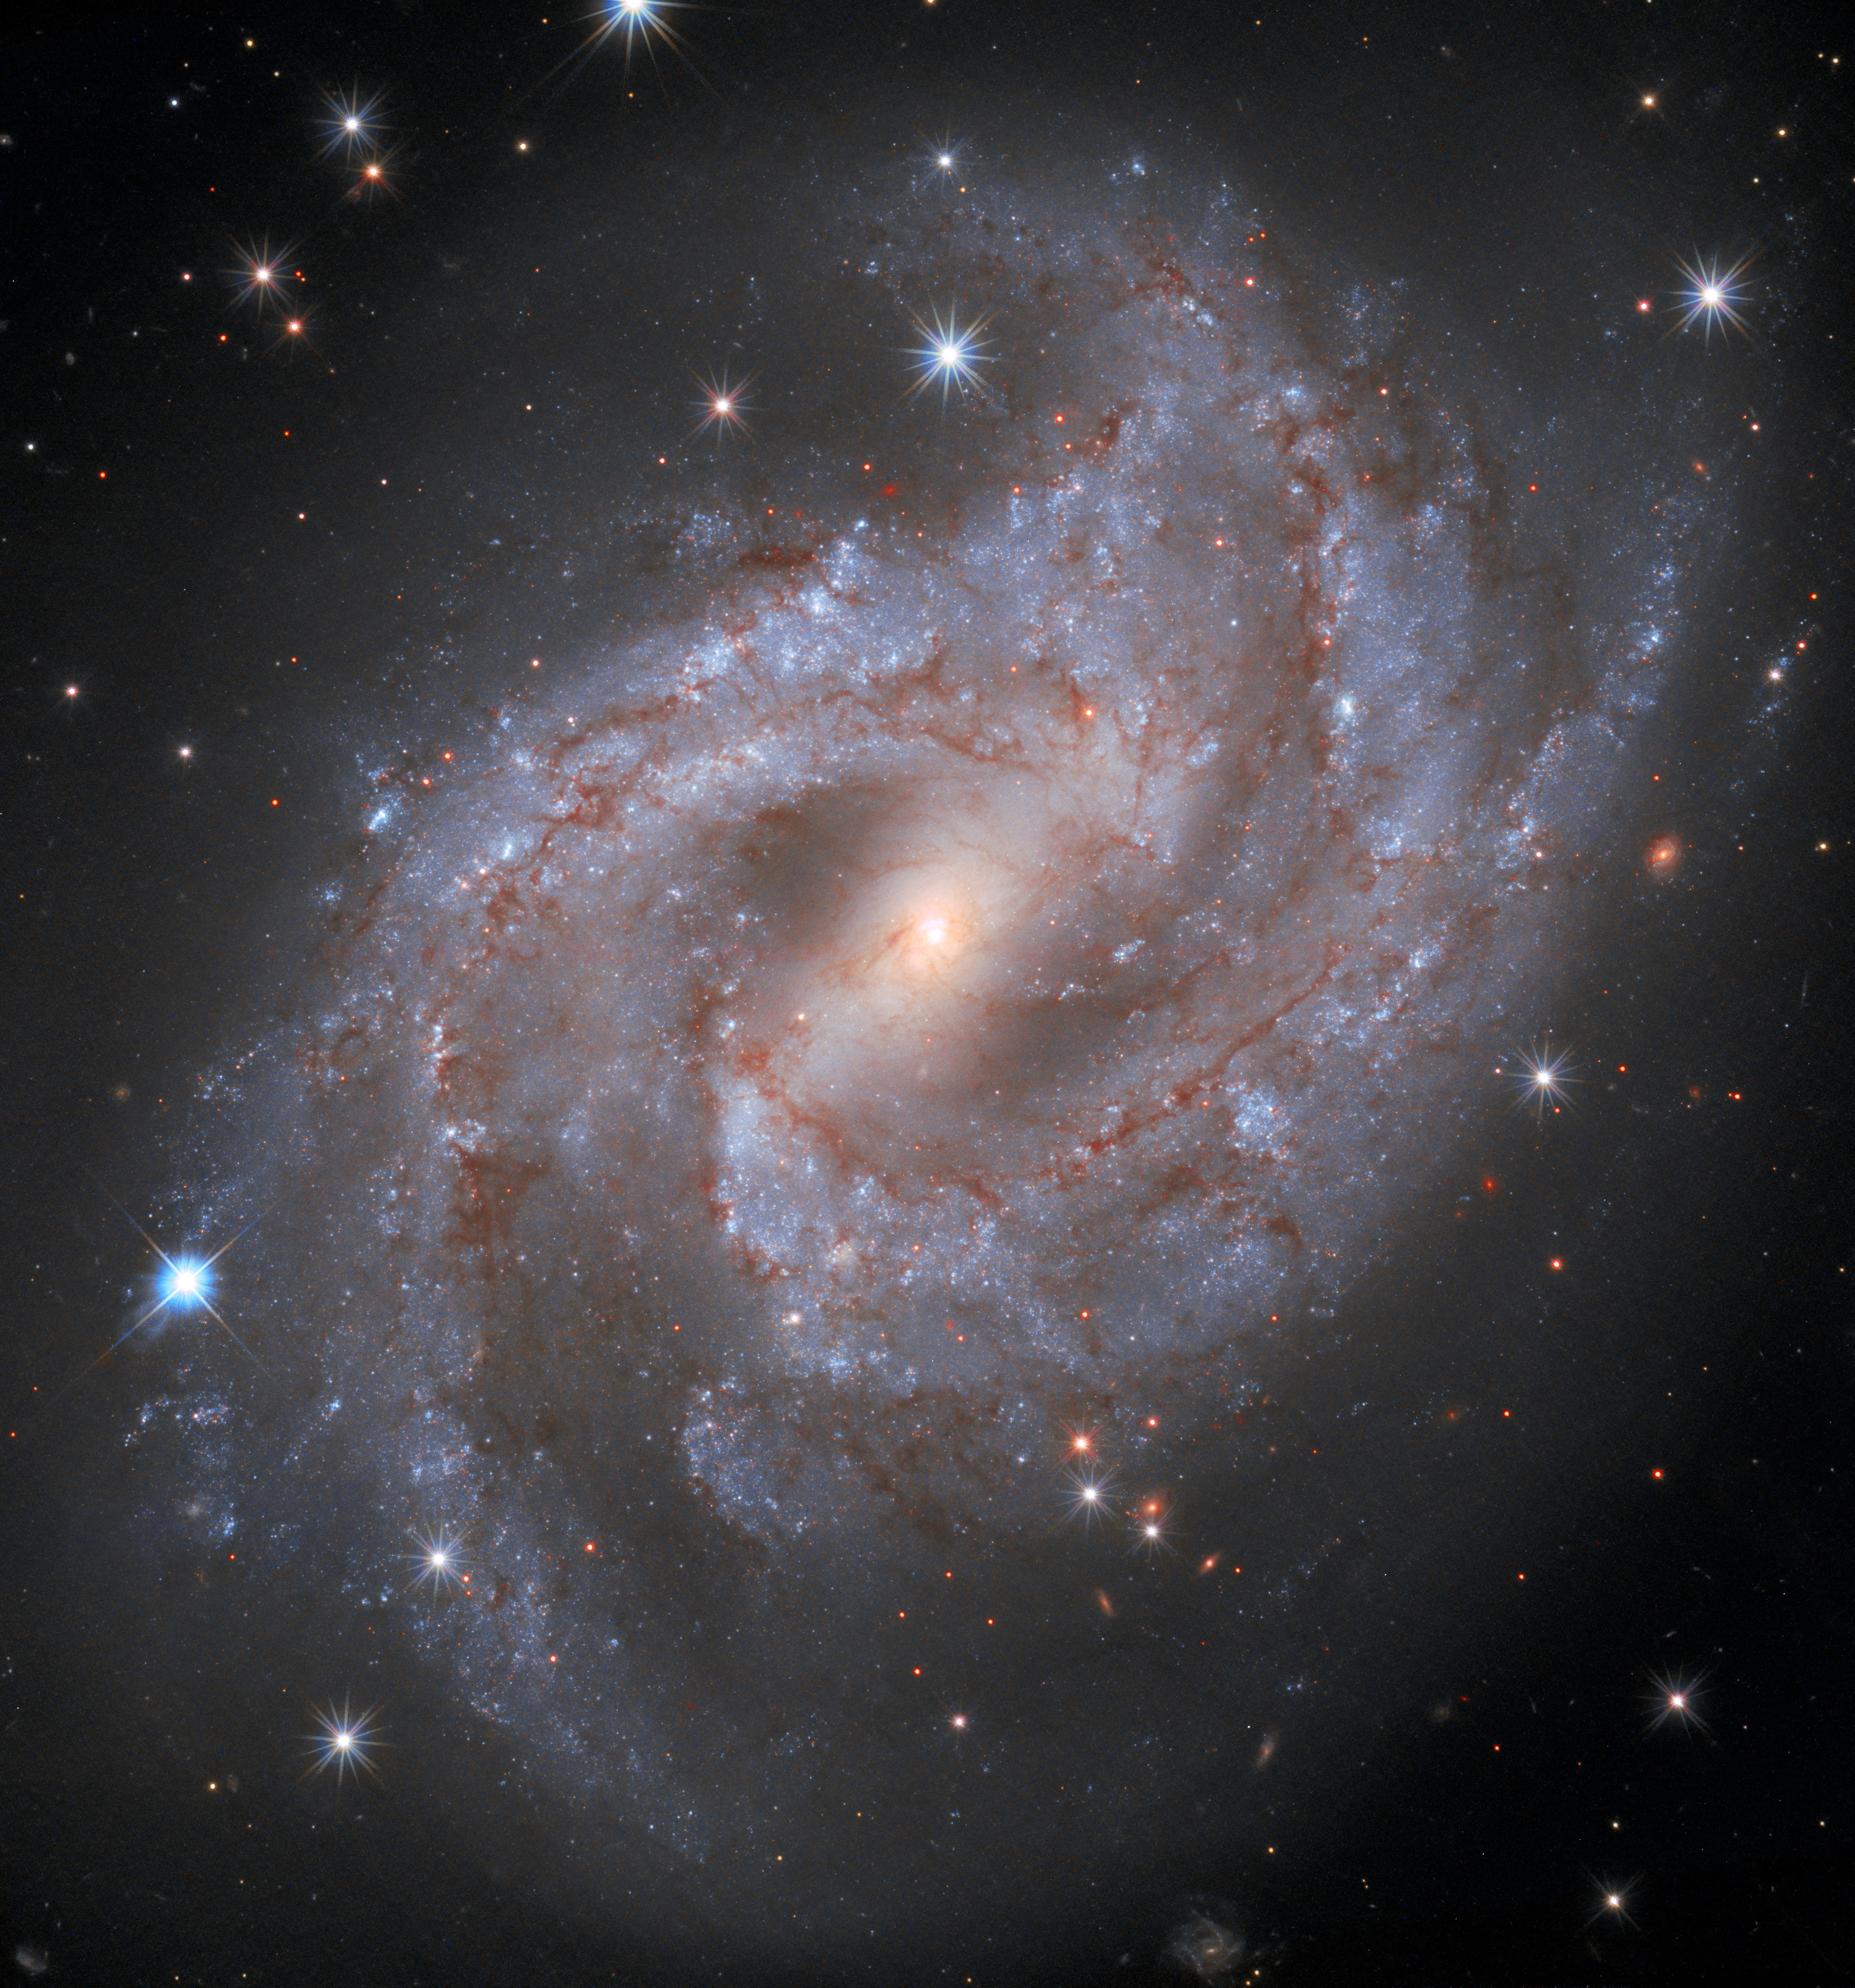

Galaxy NGC 2525

Pictured here is the captivating galaxy NGC 2525. Located nearly 70 million light-years from Earth, this galaxy is part of the constellation of Puppis in the southern hemisphere. Together with the Carina and the Vela constellations, it makes up an image of the Argo from ancient greek mythology.

Another kind of monster, a supermassive black hole, lurks at the centre of NGC 2525. Nearly every galaxy contains a supermassive black hole, which can range in mass from hundreds of thousands to billions of times the mass of the Sun.

Hubble has captured a series of images of NGC2525 as part of one of its major investigations; measuring the expansion rate of the Universe, which can help answer fundamental questions about our Universe’s very nature. ESA/Hubble has now published a unique time-lapse of this galaxy and it’s fading supernova.

Credit: ESA/Hubble & NASA, A. Riess and the SH0ES team Acknowledgment: Mahdi Zamani